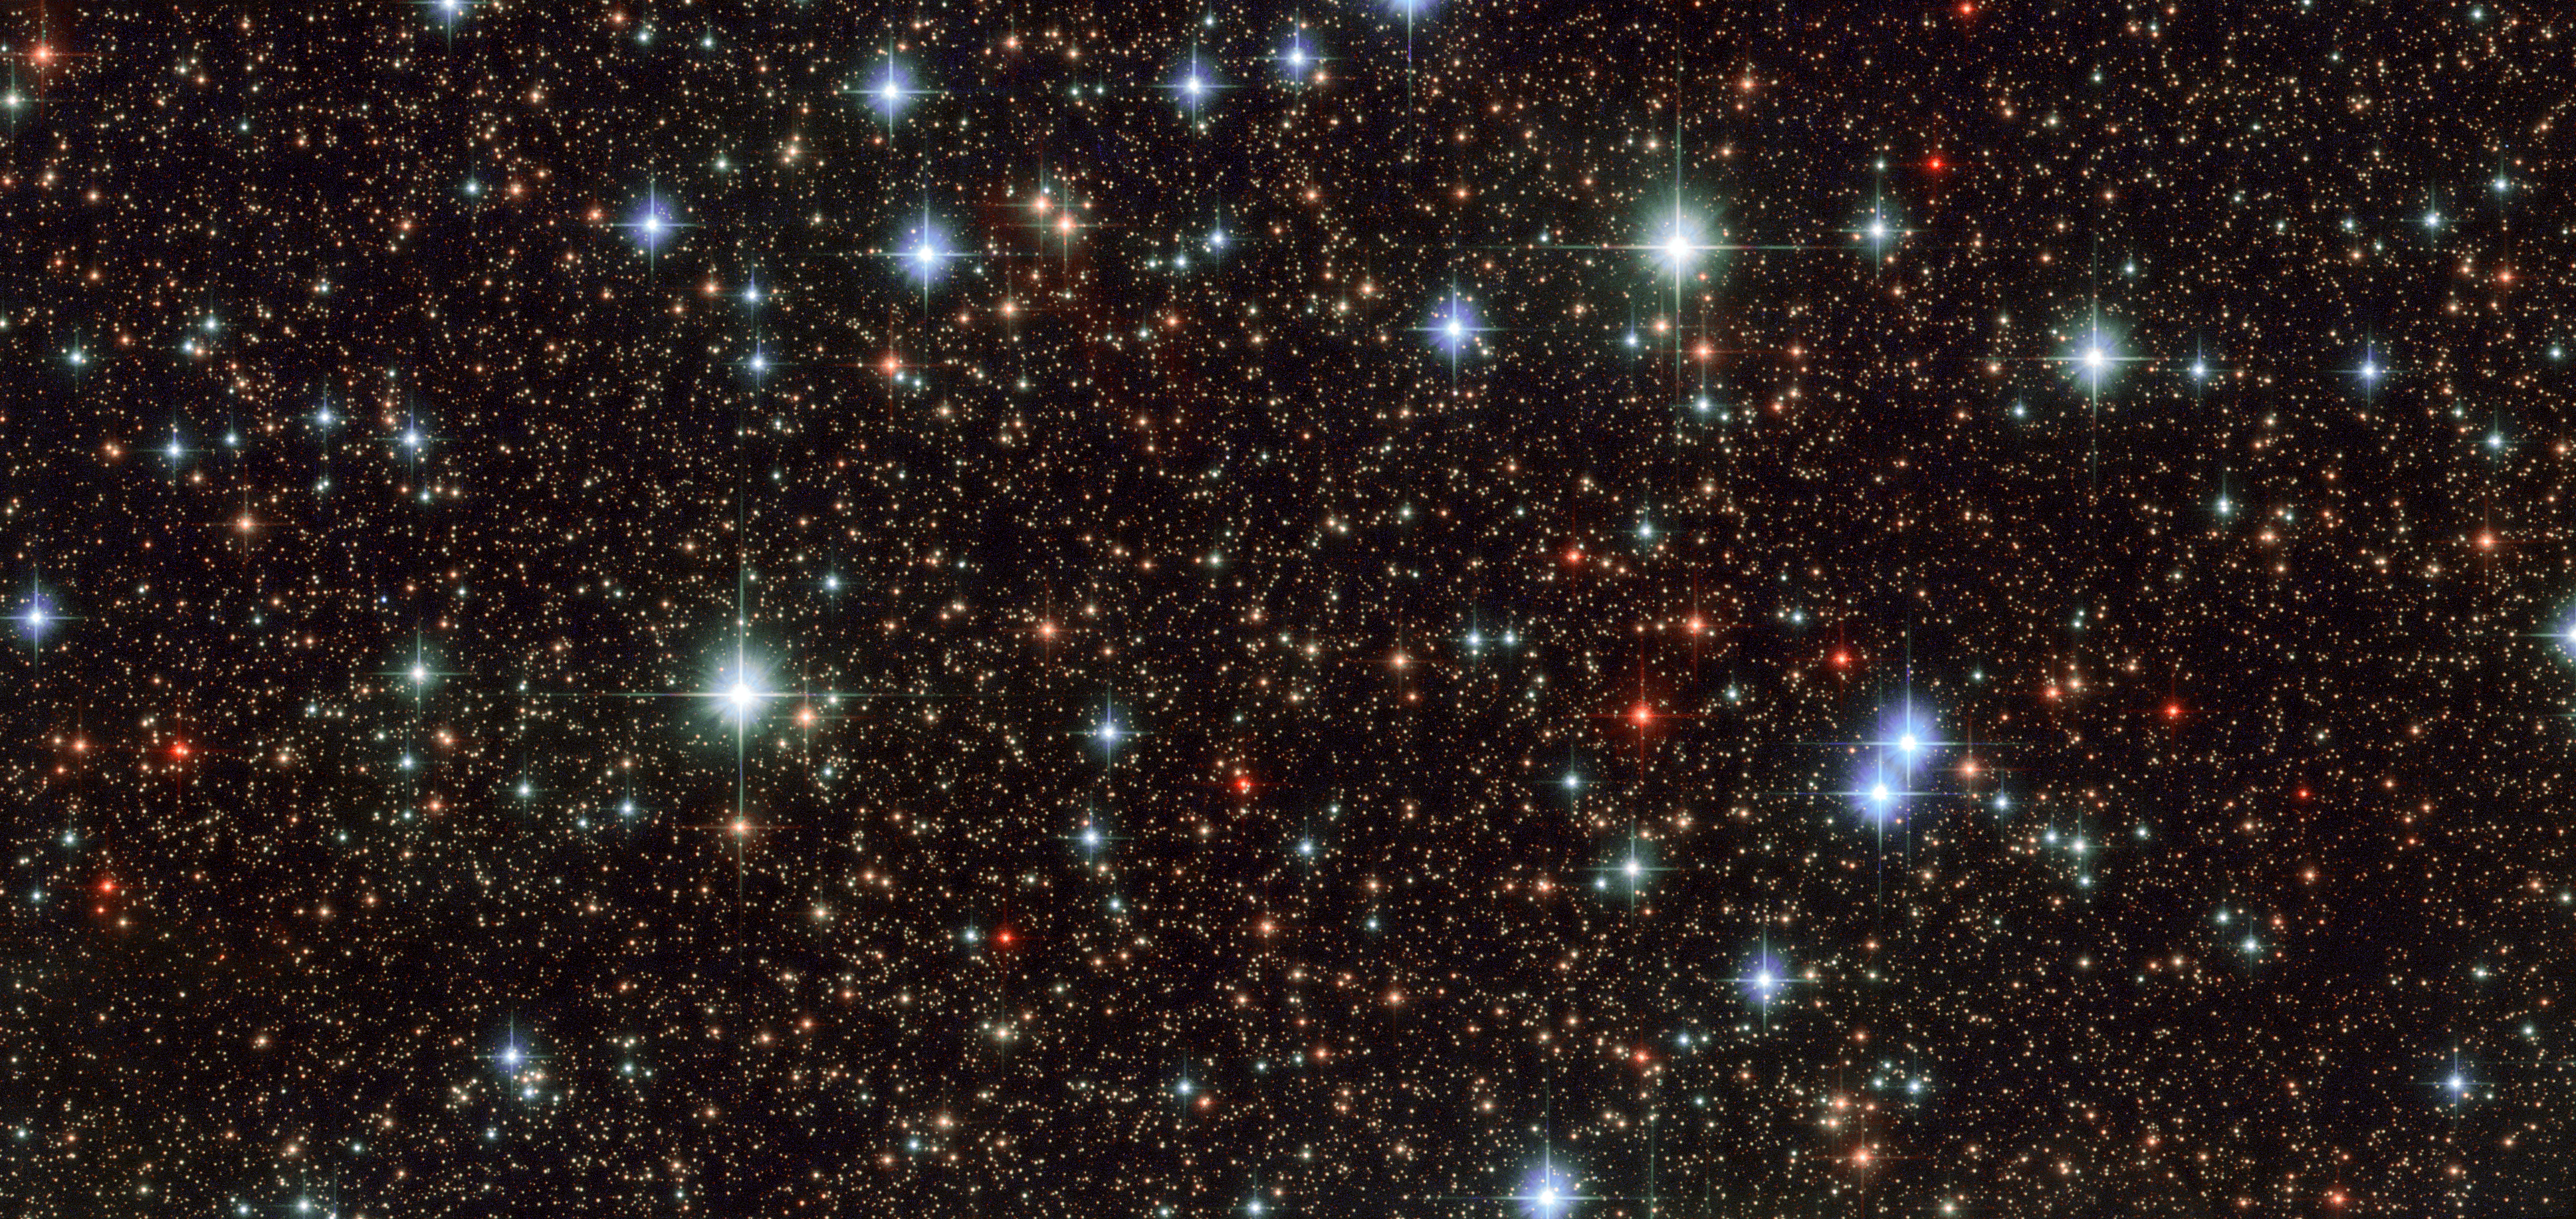

Scattered stars in Sagittarius

This colourful and star-studded view of the Milky Way galaxy was captured when the NASA/ESA Hubble Space Telescope pointed its cameras towards the constellation of Sagittarius (The Archer). Blue stars can be seen scattered across the frame, set against a distant backdrop of red-hued cosmic companions. This blue litter most likely formed at the same time from the same collapsing molecular cloud.

The colour of a star can reveal many of its secrets. Shades of red indicate a star much cooler than the Sun, so either at the end of its life, or much less massive. These lower-mass stars are called red dwarfs and are thought to be the most common type of star within the Milky Way. Similarly, brilliant blue hues indicate hot, young, or massive stars, many times the mass of the Sun.

A star’s mass decides its fate; more massive stars burn brightly over a short lifespan, and die young after only tens of millions of years. Stars like the Sun typically have more sedentary lifestyles and live longer, burning for approximately ten billion years. Smaller stars, on the other hand, live life in the slow lane and are predicted to exist for trillions of years, well beyond the current age of the Universe.

Credit: ESA/Hubble & NASA